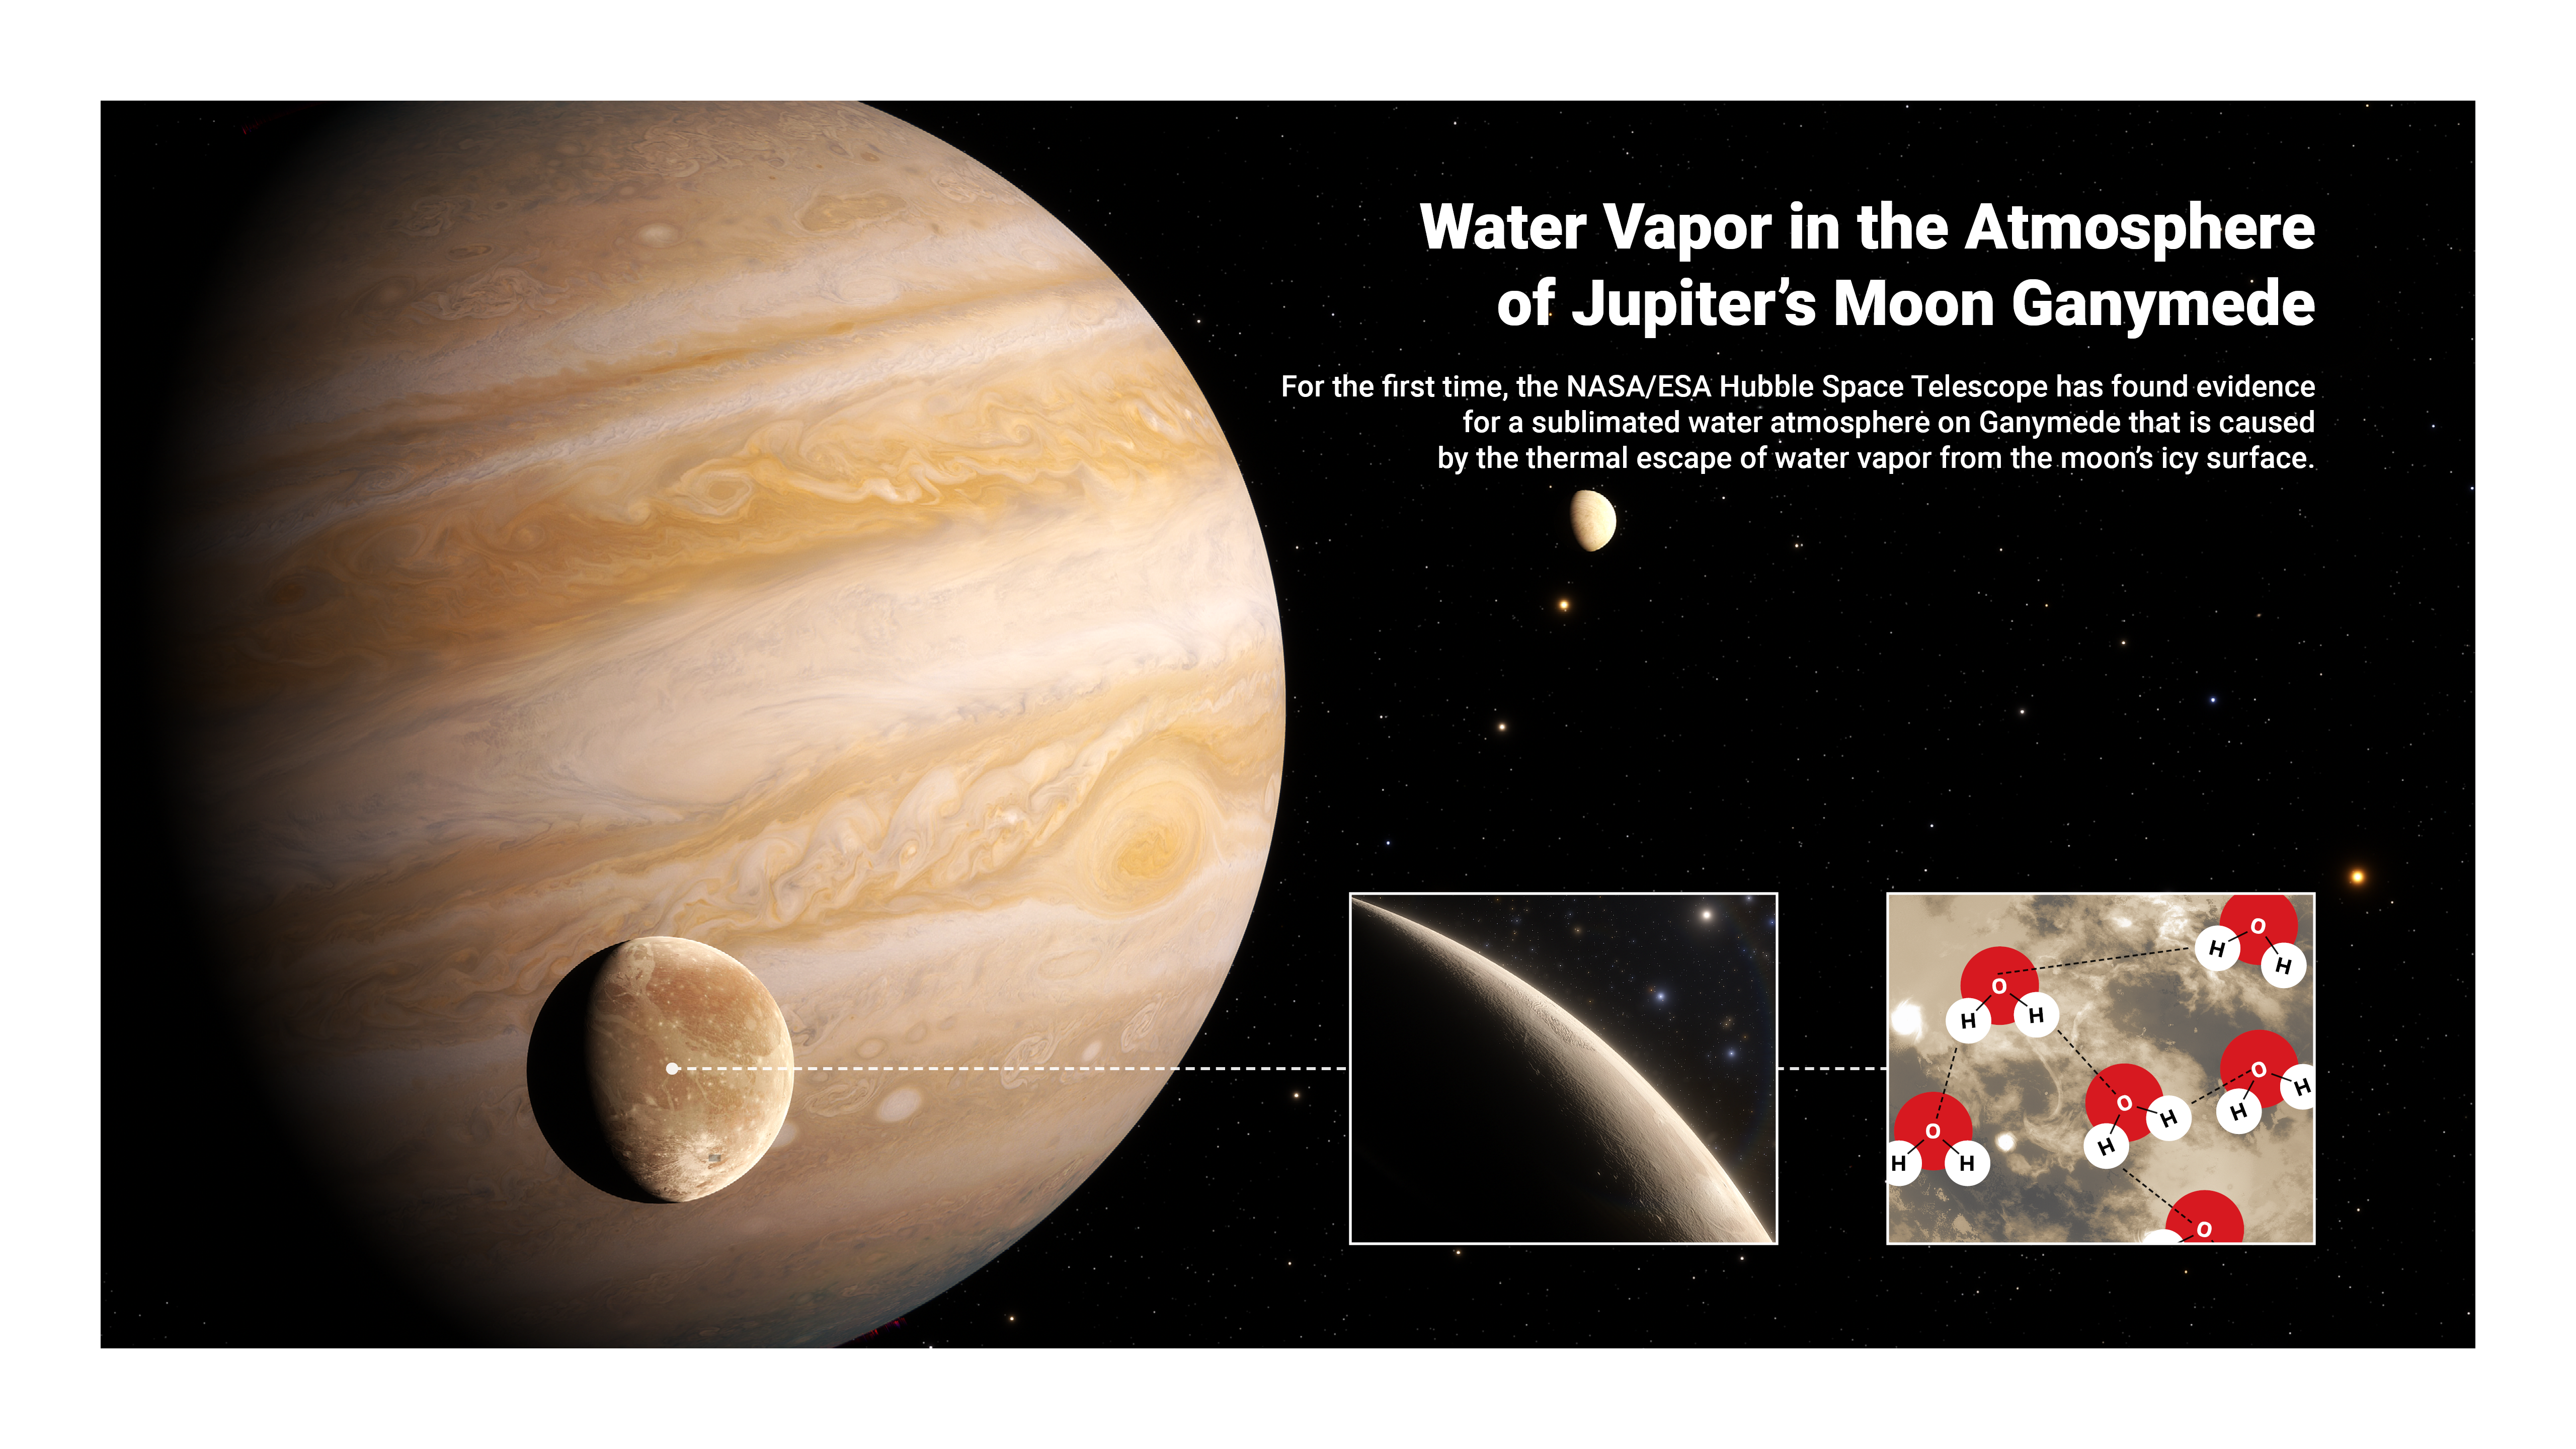

Artist’s Impression of a Sublimated Water Atmosphere on Ganymede

This image presents an artist’s impression infographic to highlight that astronomers have now used archival datasets from the NASA/ESA Hubble Space Telescope to reveal the first evidence for water vapour in the atmosphere of Jupiter’s moon Ganymede, the result of the thermal escape of water vapour from the moon’s icy surface.

Credit: ESA/Hubble, J. daSilva